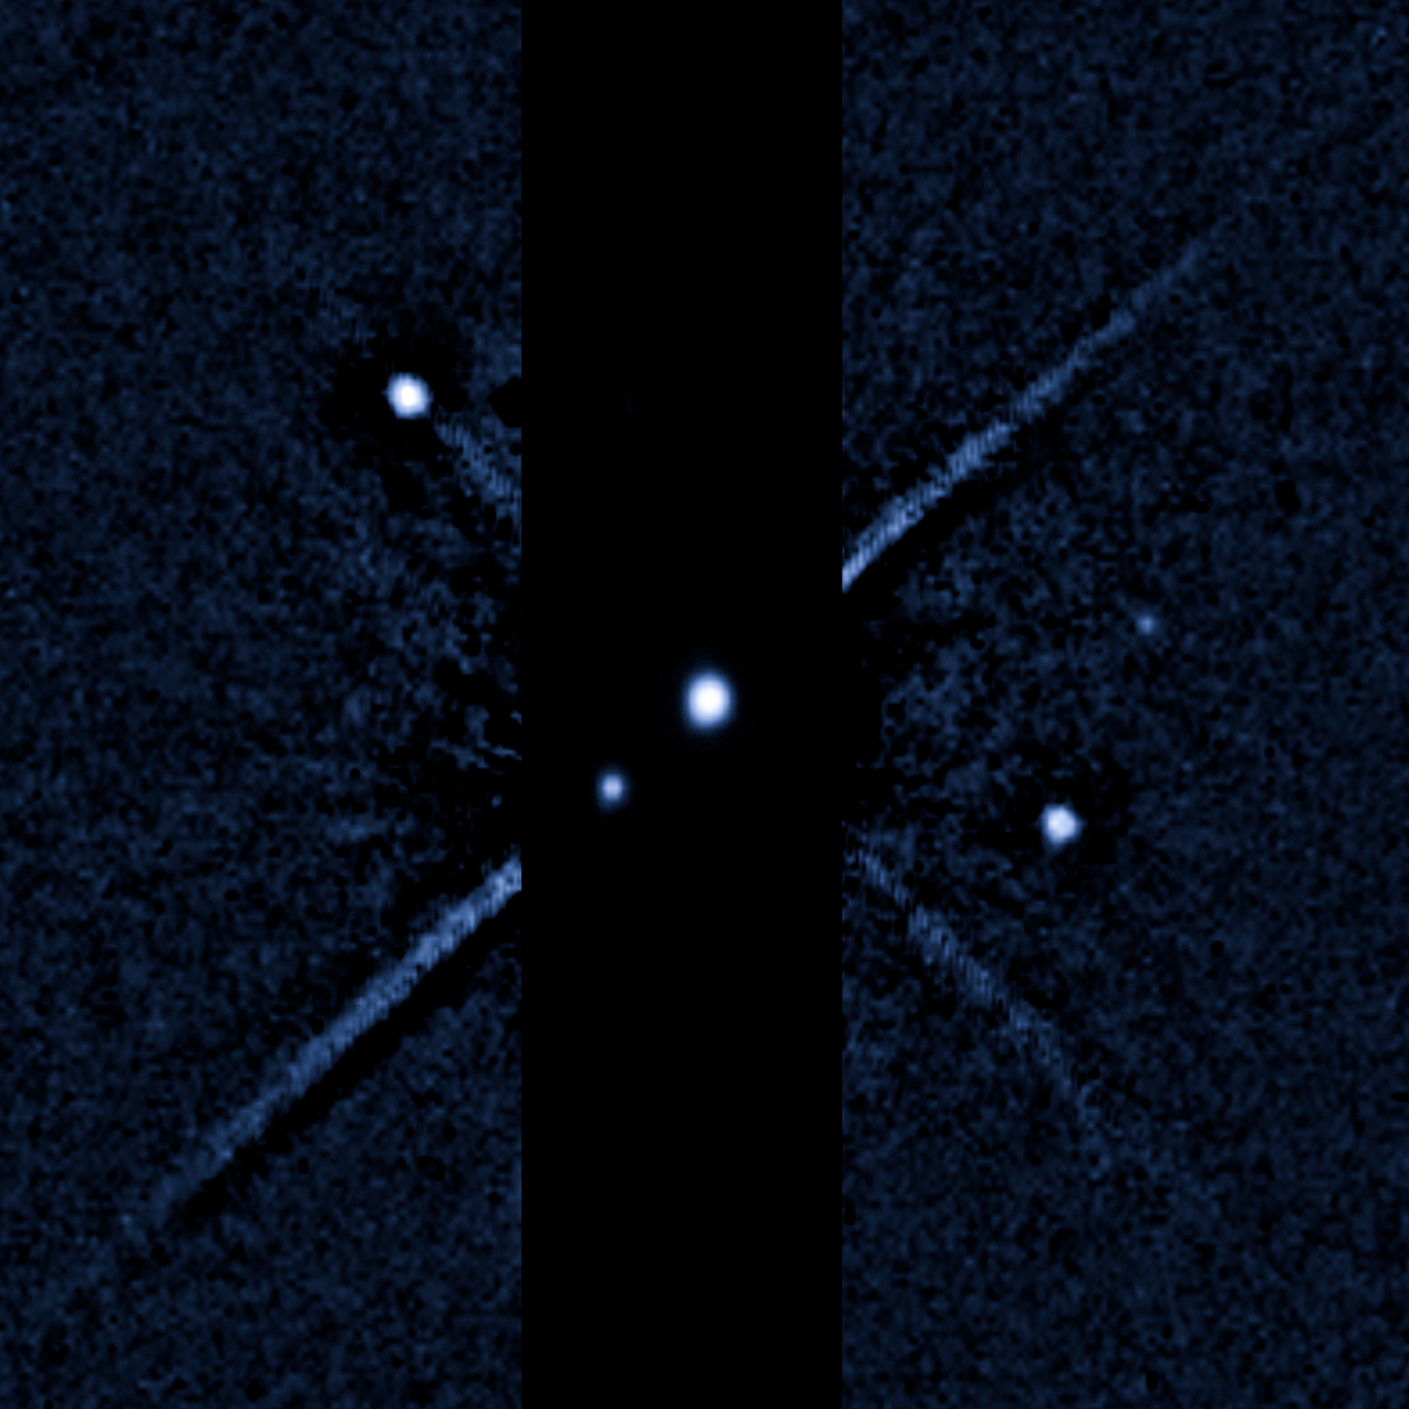

Pluto: 28 June 2011

Pluto on 28 June 28 2011 (WFC/UVIS).

Credit: NASA, ESA, and M. Showalter (SETI Institute)